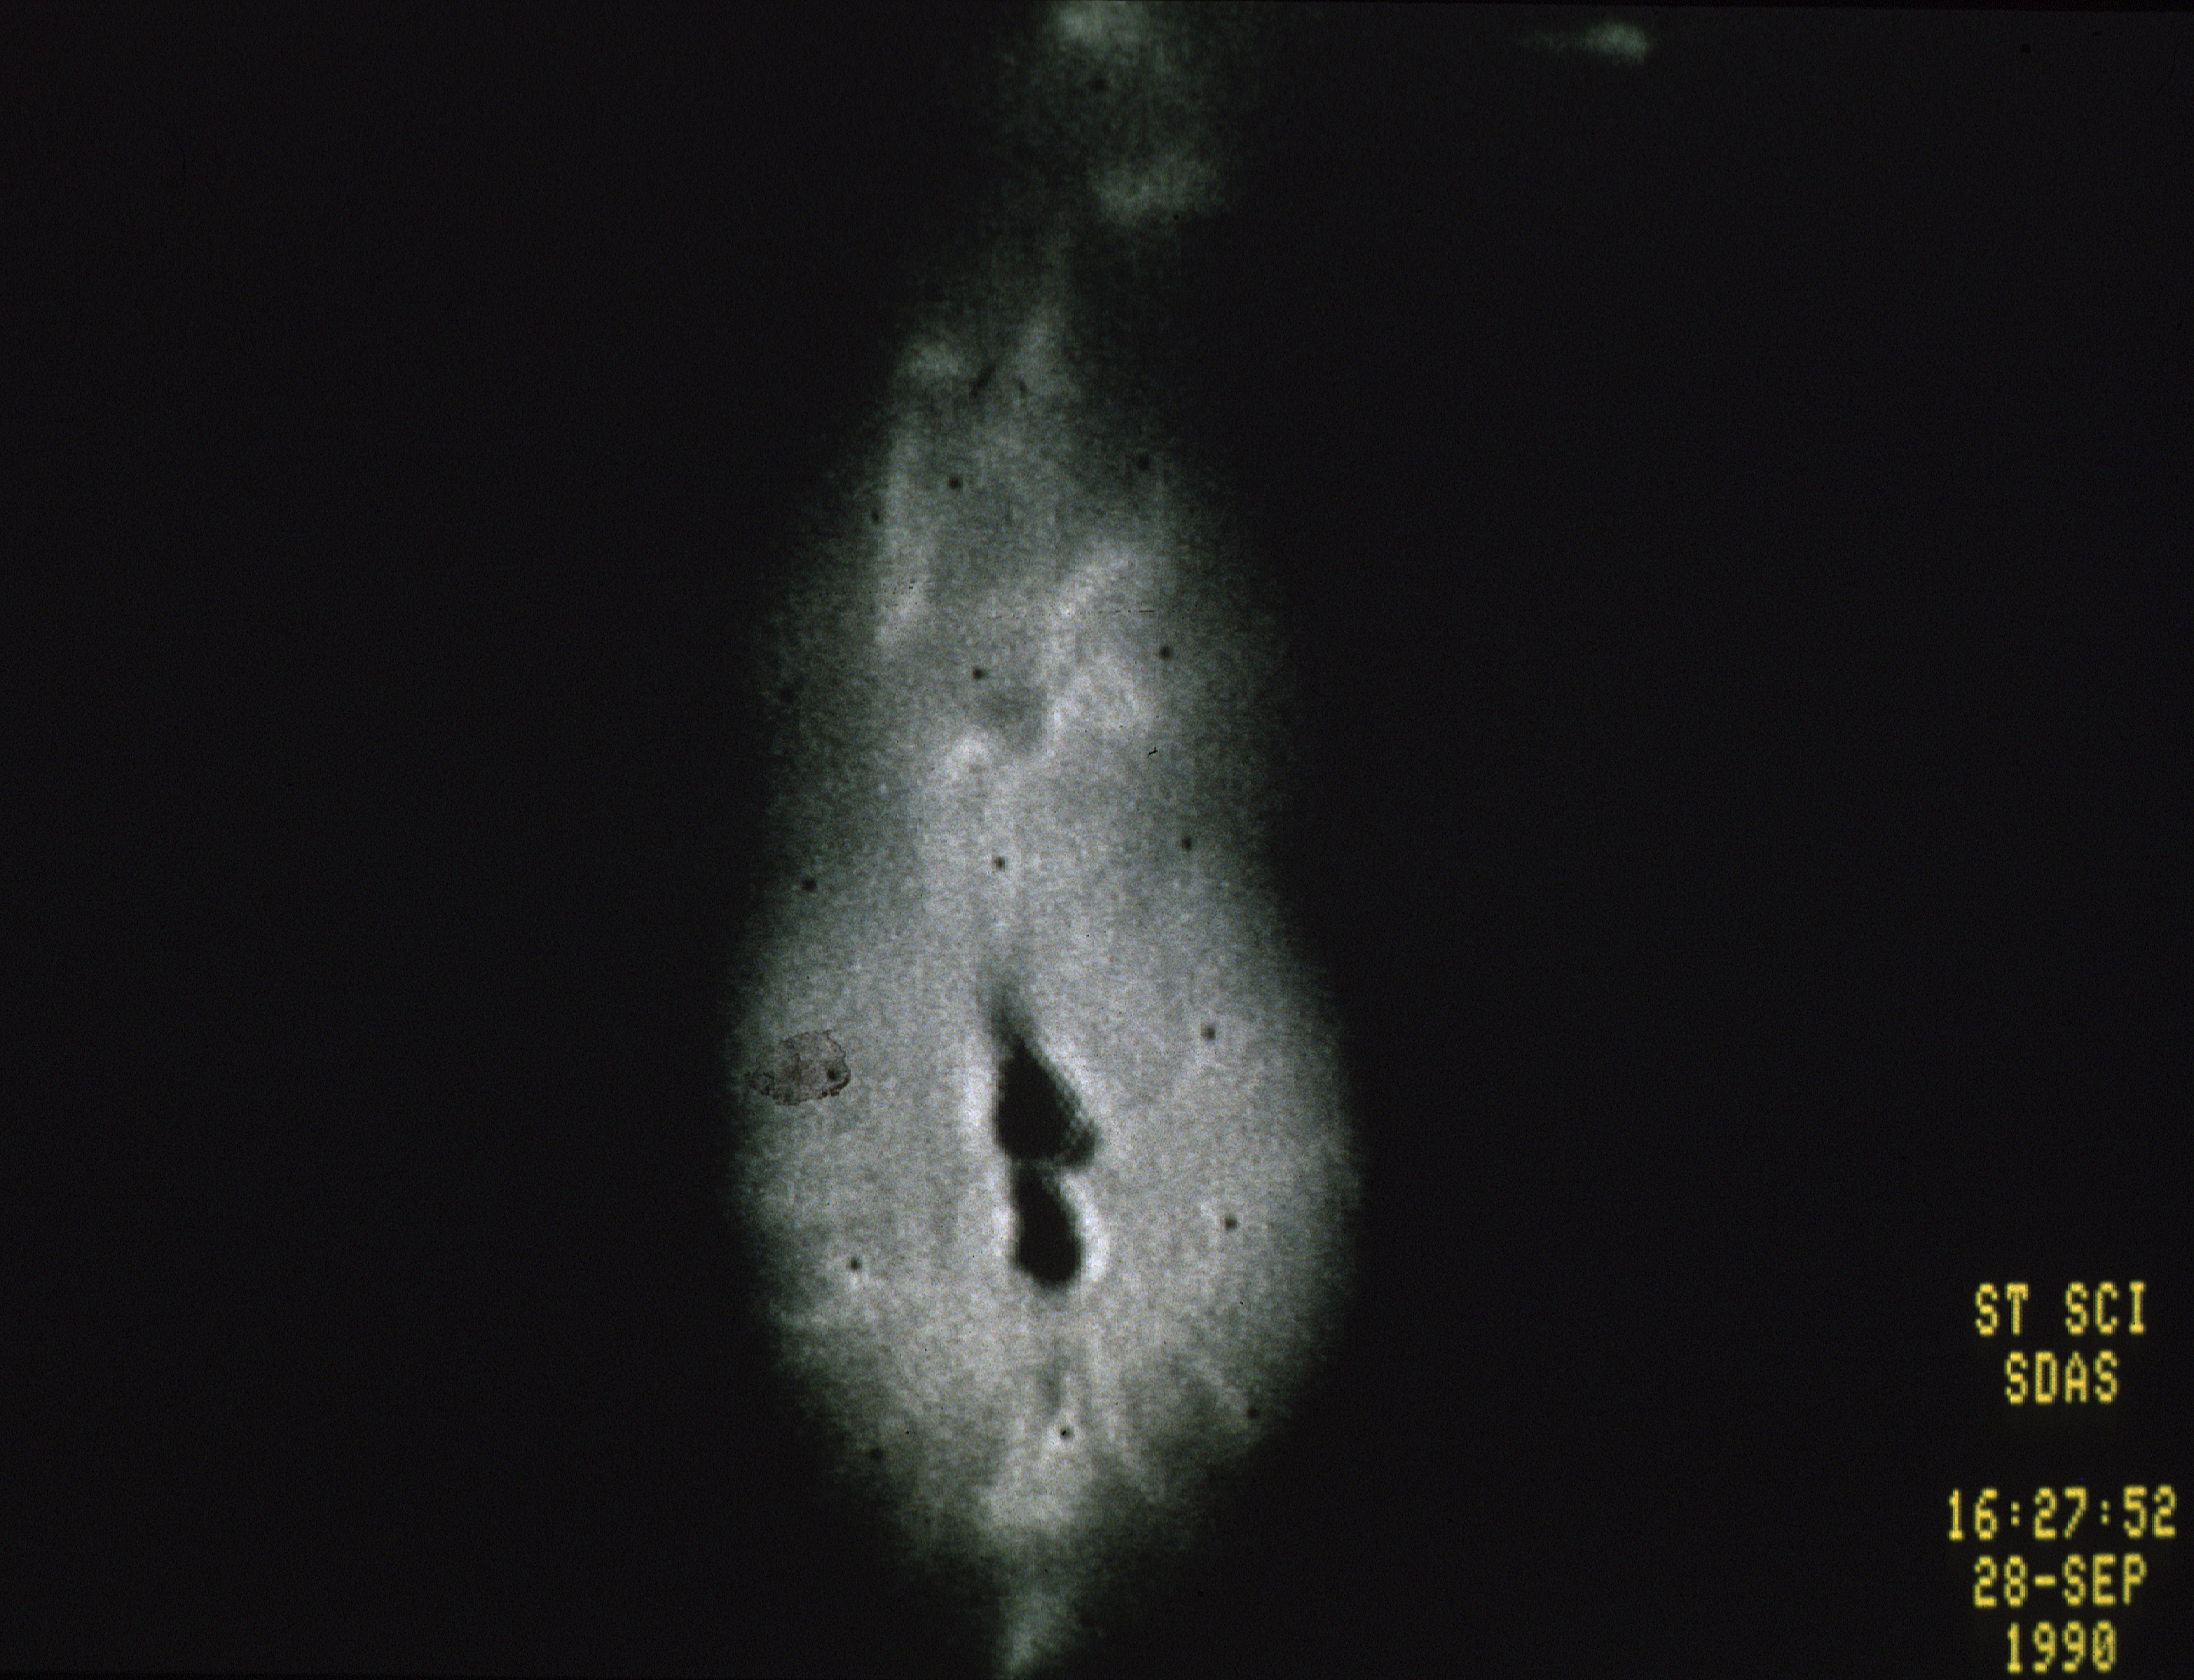

R Aquarii - a nearby exploding star

This is the first picture taken by HST of a recent nova, the star system R-Aquarii. The two dark knots at the center of the image probably contain the binary star system itself, which consists of a red giant and white dwarf star. The knots are dark due to saturation effects produced by the FOC detector when it observes very bright objects.

The filamentary features emanating from the core are hot gas (plasma) that has been ejected at high speeds from the binary pair. The plasma emerges as a 400 billion kilometer-long geyser which is twisted by the force of the explosion and channeled upwards and outwards by strong magnetic fields. The flowing material appears to bend back on itself in a spiral pattern, perhaps due to obstruction in the path.

Credit: NASA and ESA